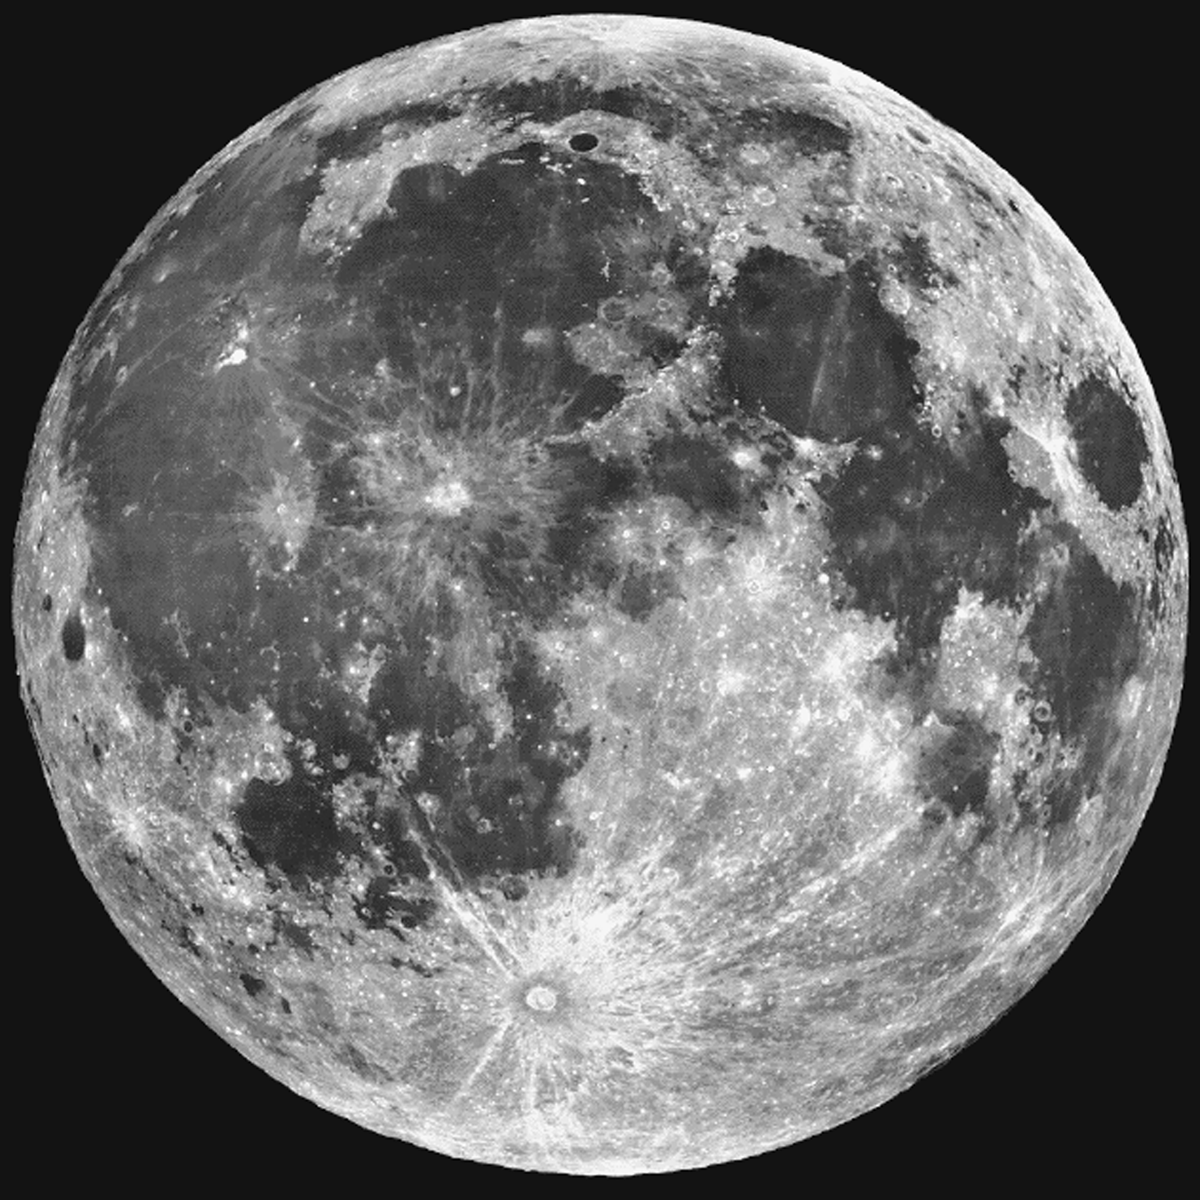

Moon

Earth's moon, with its dark basaltic mare, clearly visible in great detail.

Credit: Lick Observatory